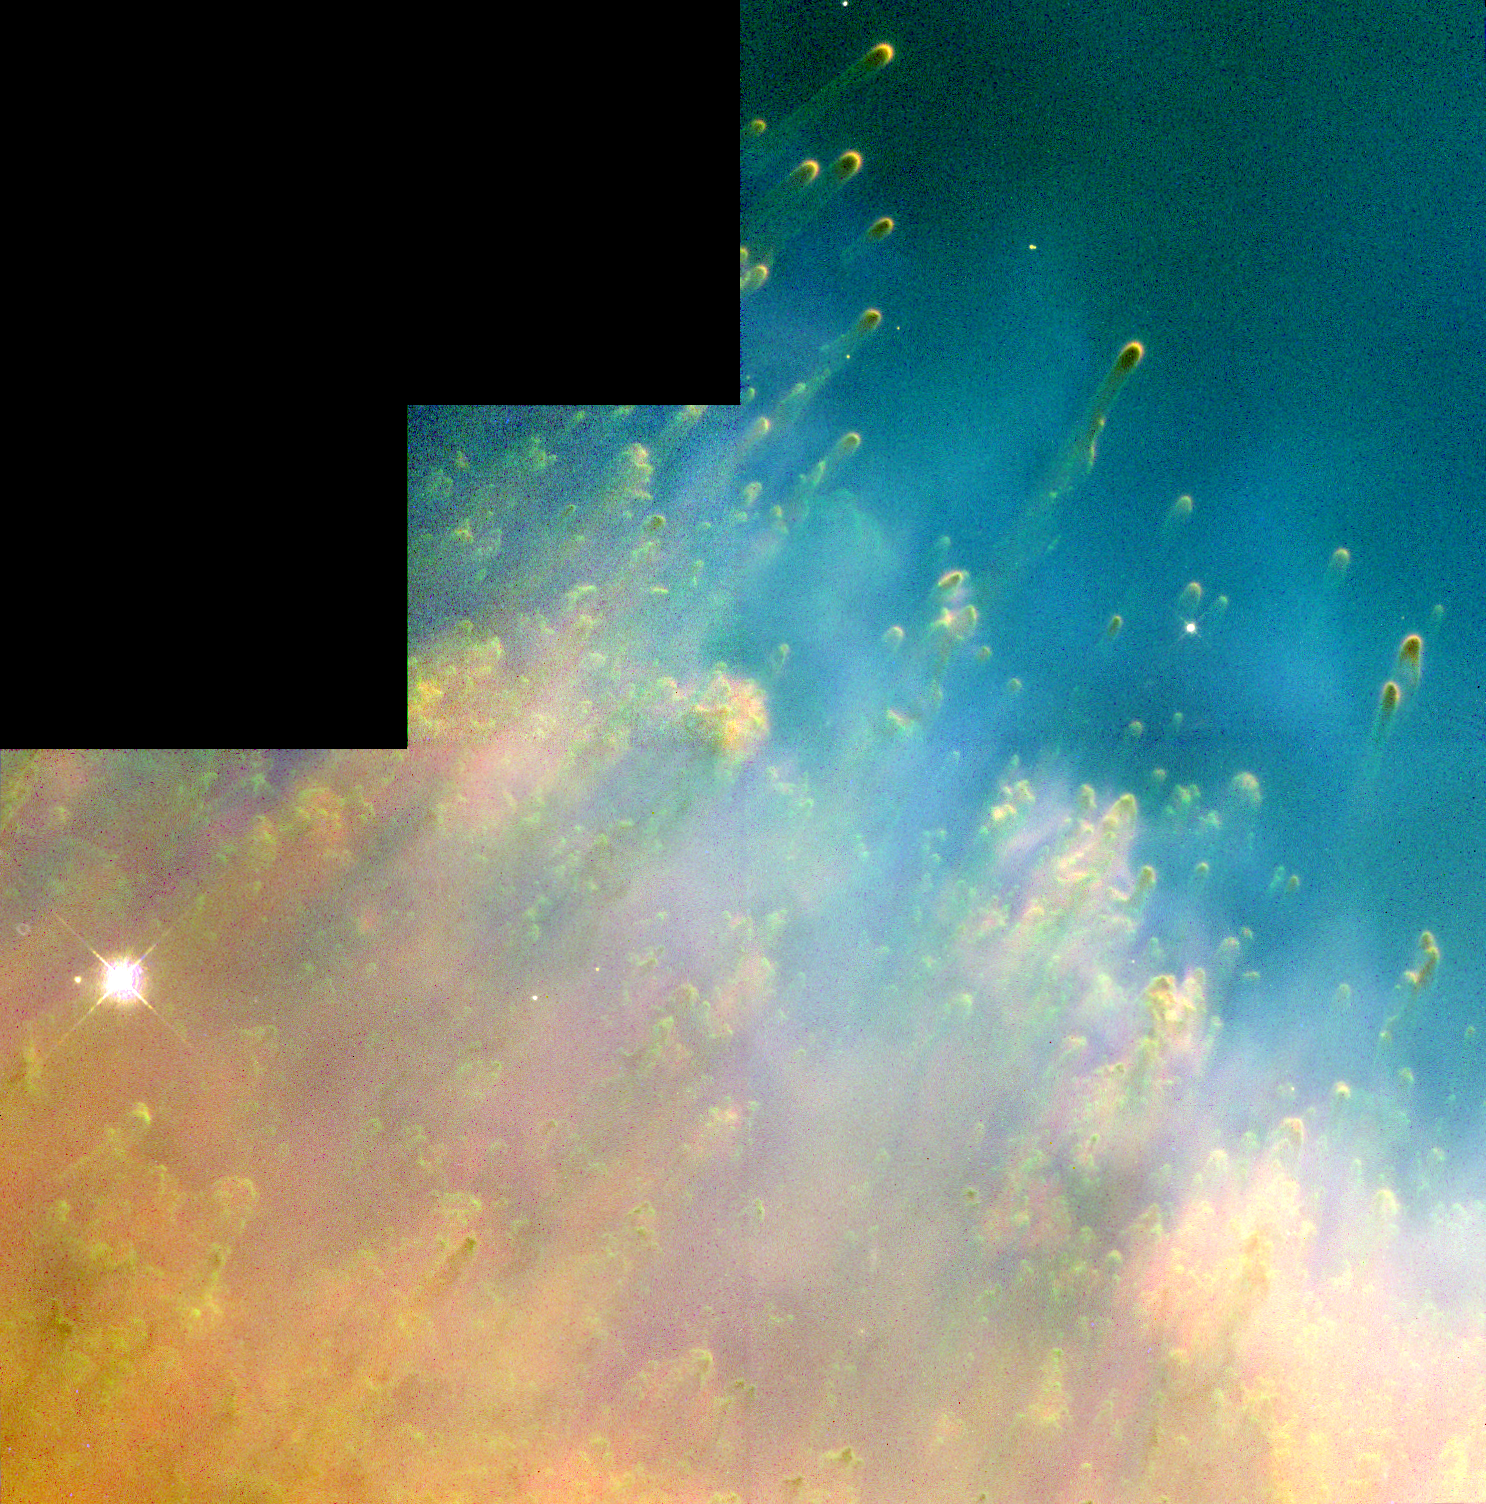

Colliding gas in the Helix Nebula

This colorful image from the Hubble Space Telescope shows the collision of two gases near a dying star.

Astronomers have dubbed the tadpole-like objects in the upper right-hand corner 'cometary knots' because their glowing heads and gossamer tails resemble comets.

Credit: Robert O'Dell, Kerry P. Handron (Rice University, Houston, Texas) and NASA/ESA